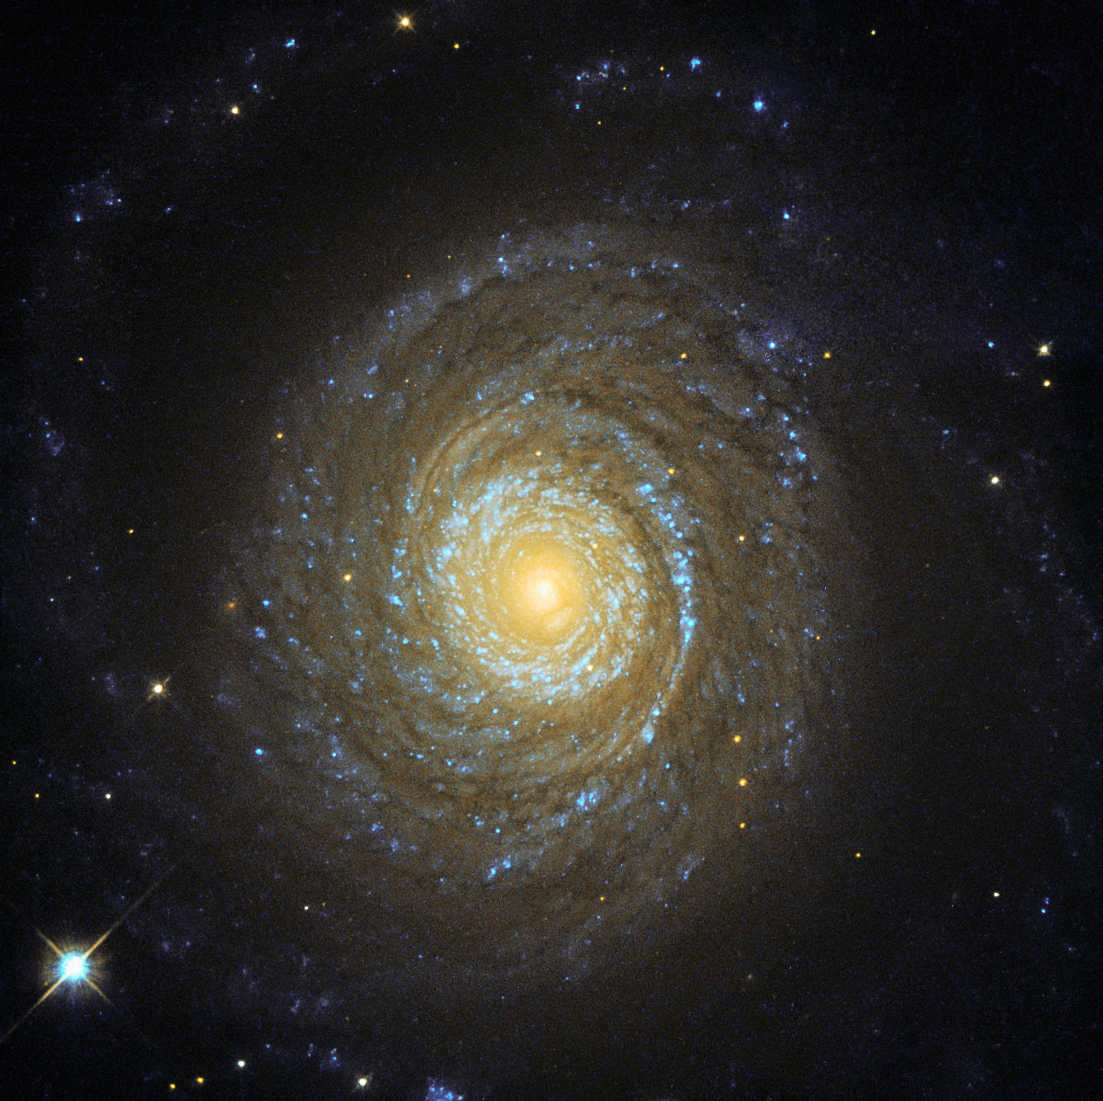

More than meets the eye

Despite the advances made in past decades, the process of galaxy formation remains an open question in astronomy. Various theories have been suggested, but since galaxies come in all shapes and sizes — including elliptical, spiral, and irregular — no single theory has so far been able to satisfactorily explain the origins of all the galaxies we see throughout the Universe.

To determine which formation model is correct (if any), astronomers hunt for the telltale signs of various physical processes. One example of this is galactic coronas, which are huge, invisible regions of hot gas that surround a galaxy’s visible bulk, forming a spheroidal shape. They are so hot that they can be detected by their X-ray emission, far beyond the optical radius of the galaxy. Because they are so wispy, these coronas are extremely difficult to detect. In 2013, astronomers highlighted NGC 6753, imaged here by the NASA/ESA Hubble Space Telescope, as one of only two known spiral galaxies that were both massive enough and close enough to permit detailed observations of their coronas. Of course, NGC 6753 is only close in astronomical terms — the galaxy is nearly 150 million light-years from Earth.

NGC 6753 is a whirl of colour in this image — the bursts of blue throughout the spiral arms are regions filled with young stars glowing brightly in ultraviolet light, while redder areas are filled with older stars emitting in the cooler near-infrared.

Credit: ESA/Hubble & NASA Acknowledgement: Judy Schmidt